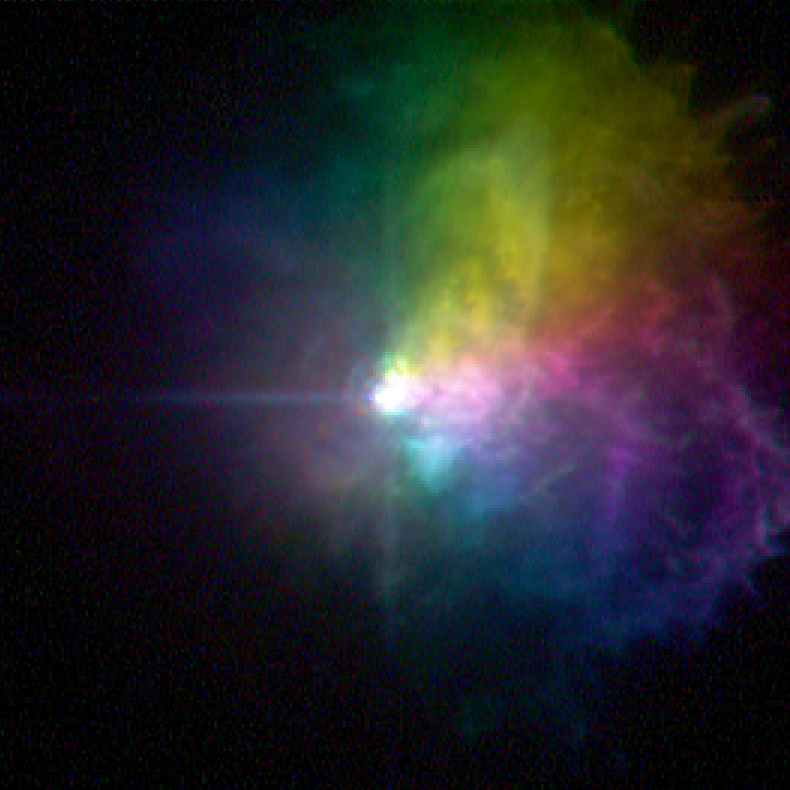

Massive star VY Canis Majoris - polarized light

VY Canis Majoris is one of the largest known stars in the Universe in respect of size. The diameter of this red hypergiant is about 1400 times larger than the Sun. Because of its size it is devouring itselve, consuming its fuel at fantastic rates. This star releases as much energy in the amount of seconds as our Sun does in an entire year.

Because red hypergiants are so active, their lifetimes are measured only in millions of years which is a blink of an eye compared to the lifetime of the Sun, which is measured in billions of years. At the end of their lifes they explode in hypernovas; these outbursts contain more energy than 100 supernovae.

Credit: NASA/ESA and R. Humphreys (University of Minnesota)